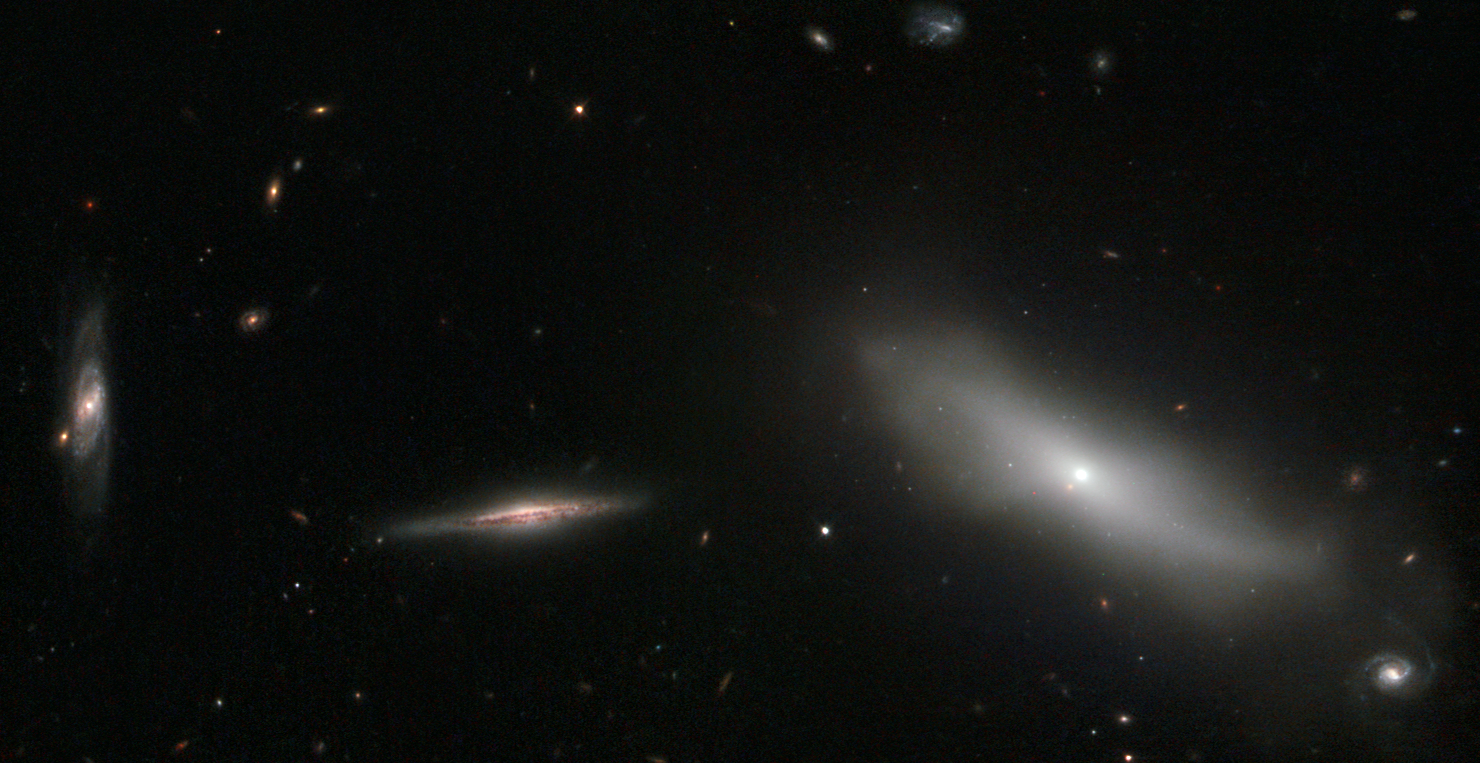

A members-only galaxy club

This new Hubble image shows a handful of galaxies in the constellation of Eridanus (The River). NGC 1190, shown here on the right of the frame, stands apart from the rest; it belong to an exclusive club known as Hickson Compact Group 22 (HCG 22).

There are four other members of this group, all of which lie out of frame: NGC 1189, NGC 1191, NGC 1192, and NGC 1199. The other galaxies shown here are nearby galaxies 2MASS J03032308-1539079 (centre), and dCAZ94 HCG 22-21 (left), both of which are not part of HCG 22.

Hickson Compact Groups are incredibly tightly bound groups of galaxies. Their discoverer Paul Hickson observed only 100 of these objects, which he described in his HCG catalogue in the 1980s. To earn the Hickson Compact Group label, there must be at least four members — each one fairly bright and compact. These short-lived groups are thought to end their lives as giant elliptical galaxies, but despite knowing much about their form and destiny, the role of compact galaxy groups in galactic formation and evolution is still unclear.

These groups are interesting partly for their self-destructive tendencies. The group members interact, circling and pulling at one another until they eventually merge together, signalling the death of the group, and the birth of a large galaxy.

A version of this image was entered into the Hubble's Hidden Treasures image processing competition by contestant Luca Limatola.

Credit: ESA/Hubble & NASA Acknowledgement: Luca Limatola